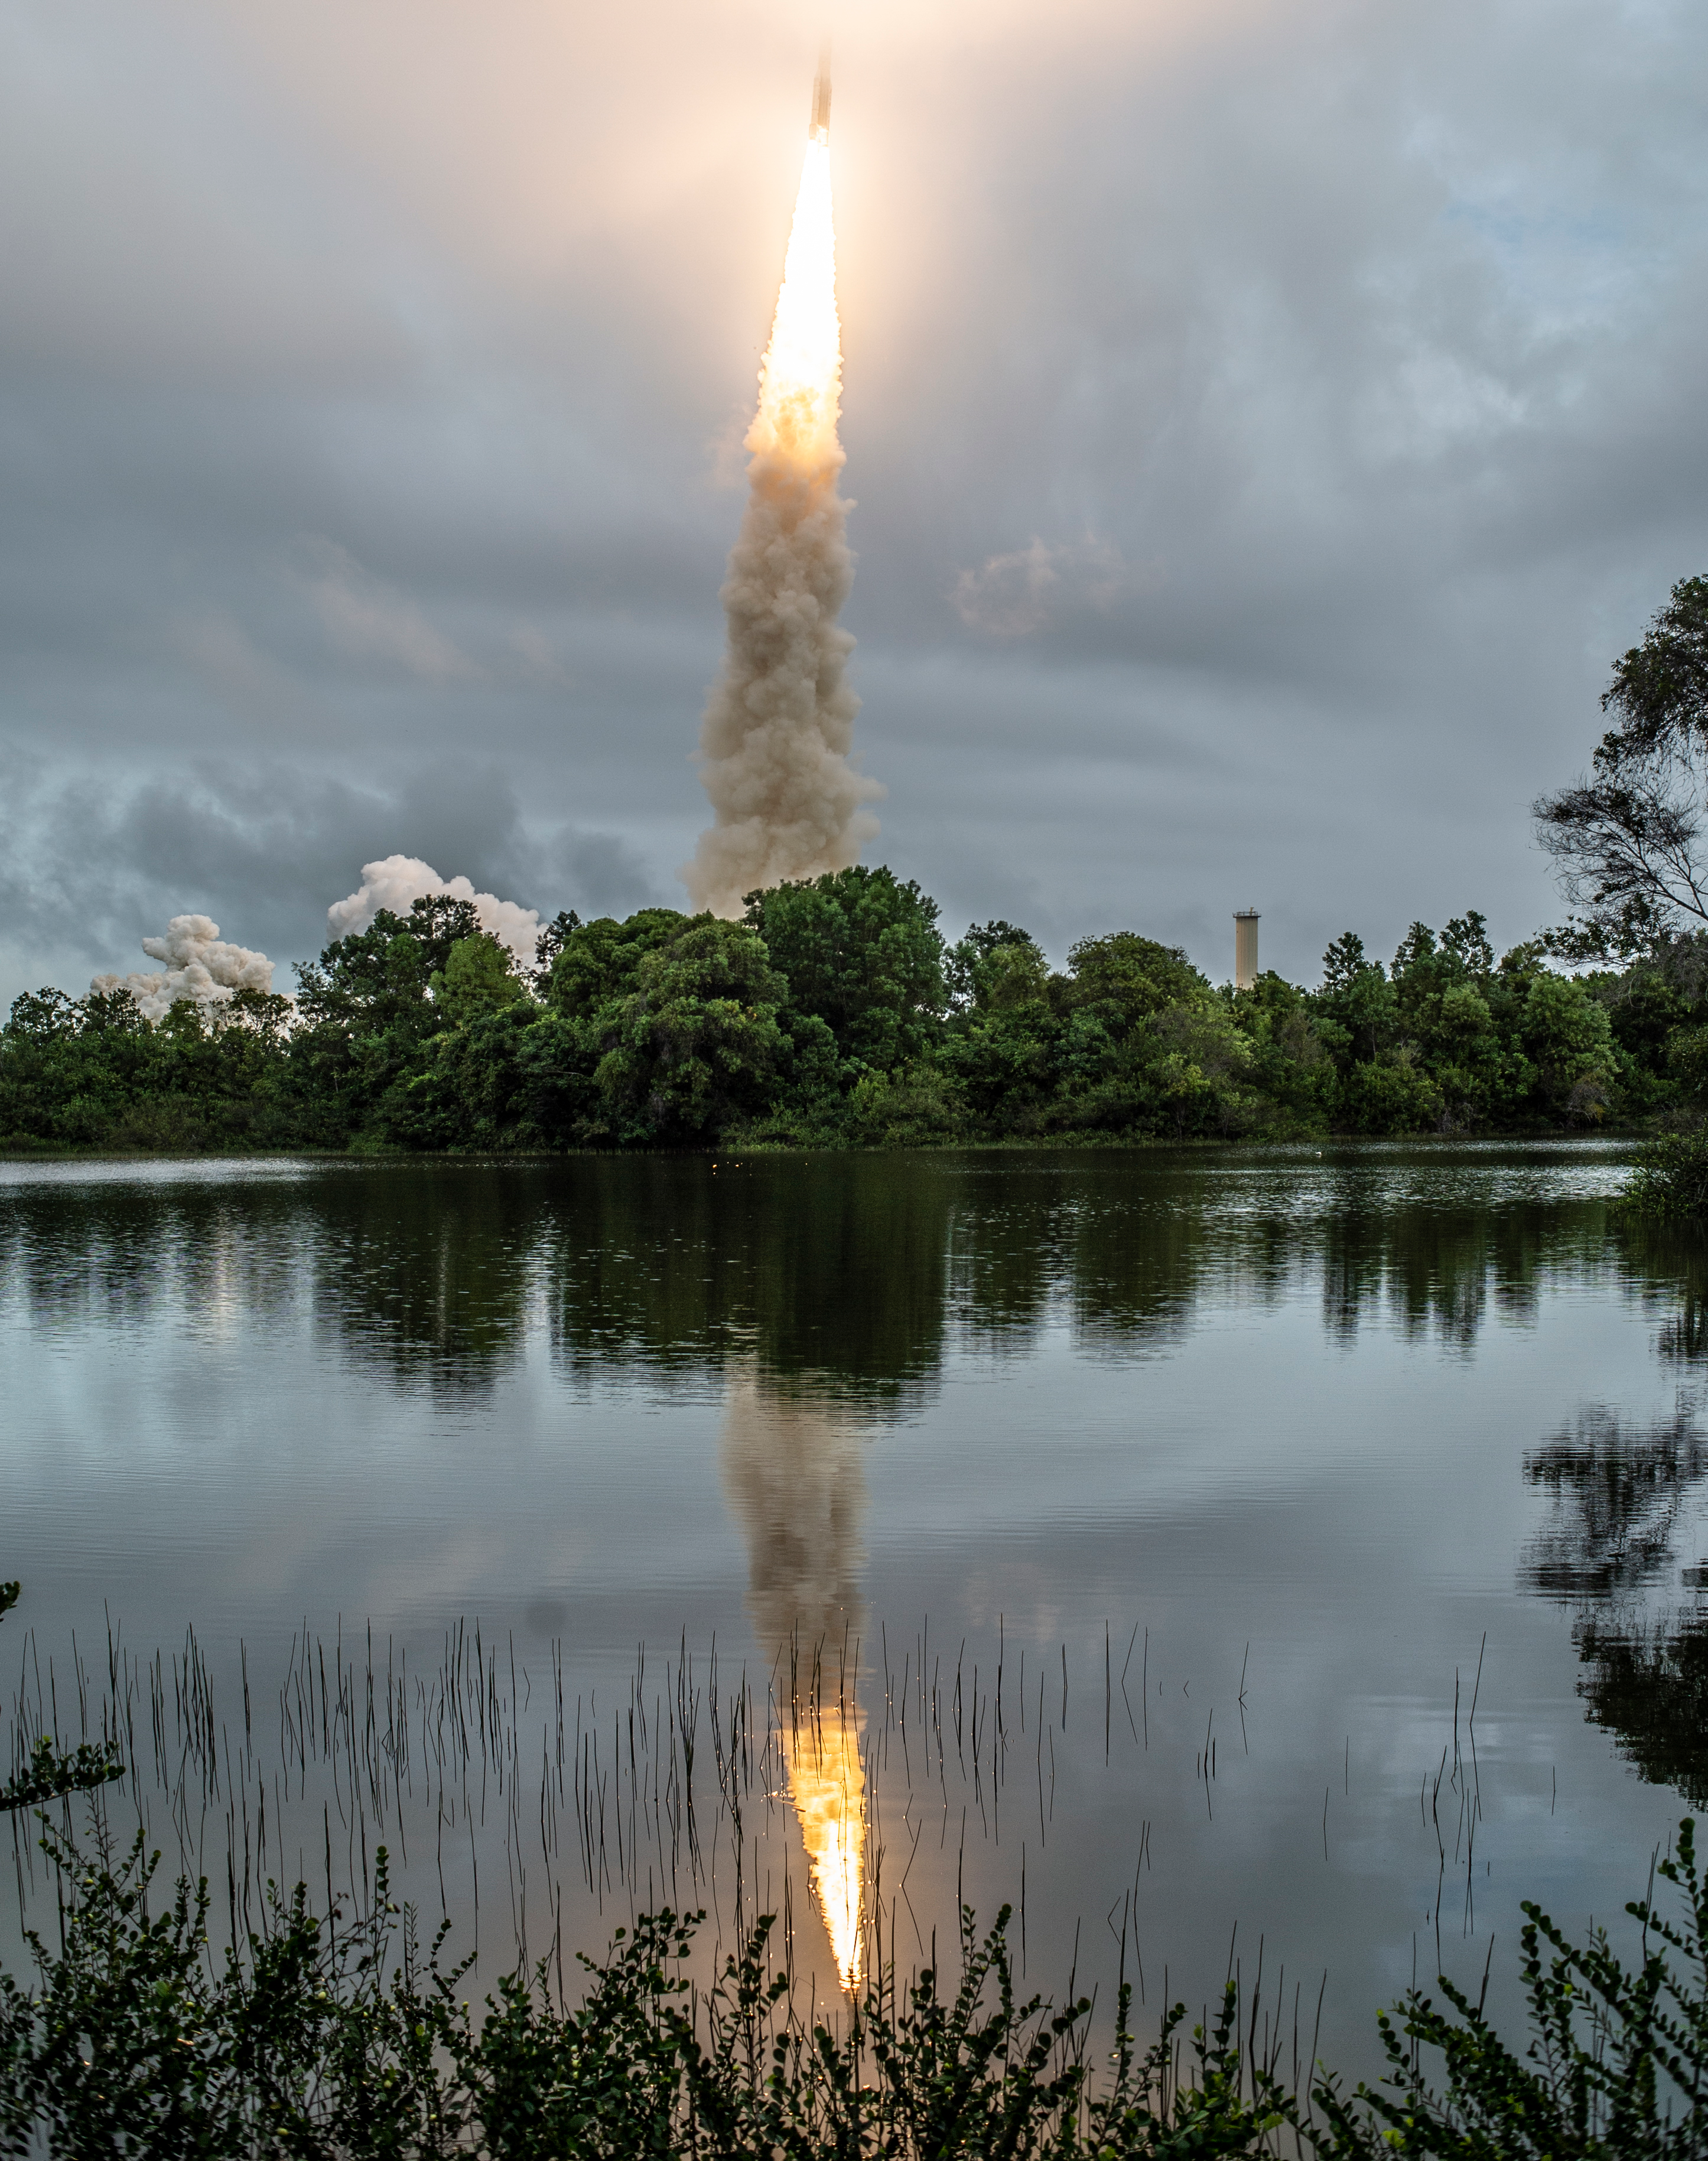

Webb liftoff on Ariane 5

Arianespace's Ariane 5 rocket launches with NASA’s James Webb Space Telescope onboard, Saturday, Dec. 25, 2021, from the ELA-3 Launch Zone of Europe’s Spaceport at the Guiana Space Centre in Kourou, French Guiana. The James Webb Space Telescope (sometimes called JWST or Webb) is a large infrared telescope with a 21.3 foot (6.5 meter) primary mirror. The observatory will study every phase of cosmic history—from within our solar system to the most distant observable galaxies in the early universe.

Credit: NASA/Chris Gunn